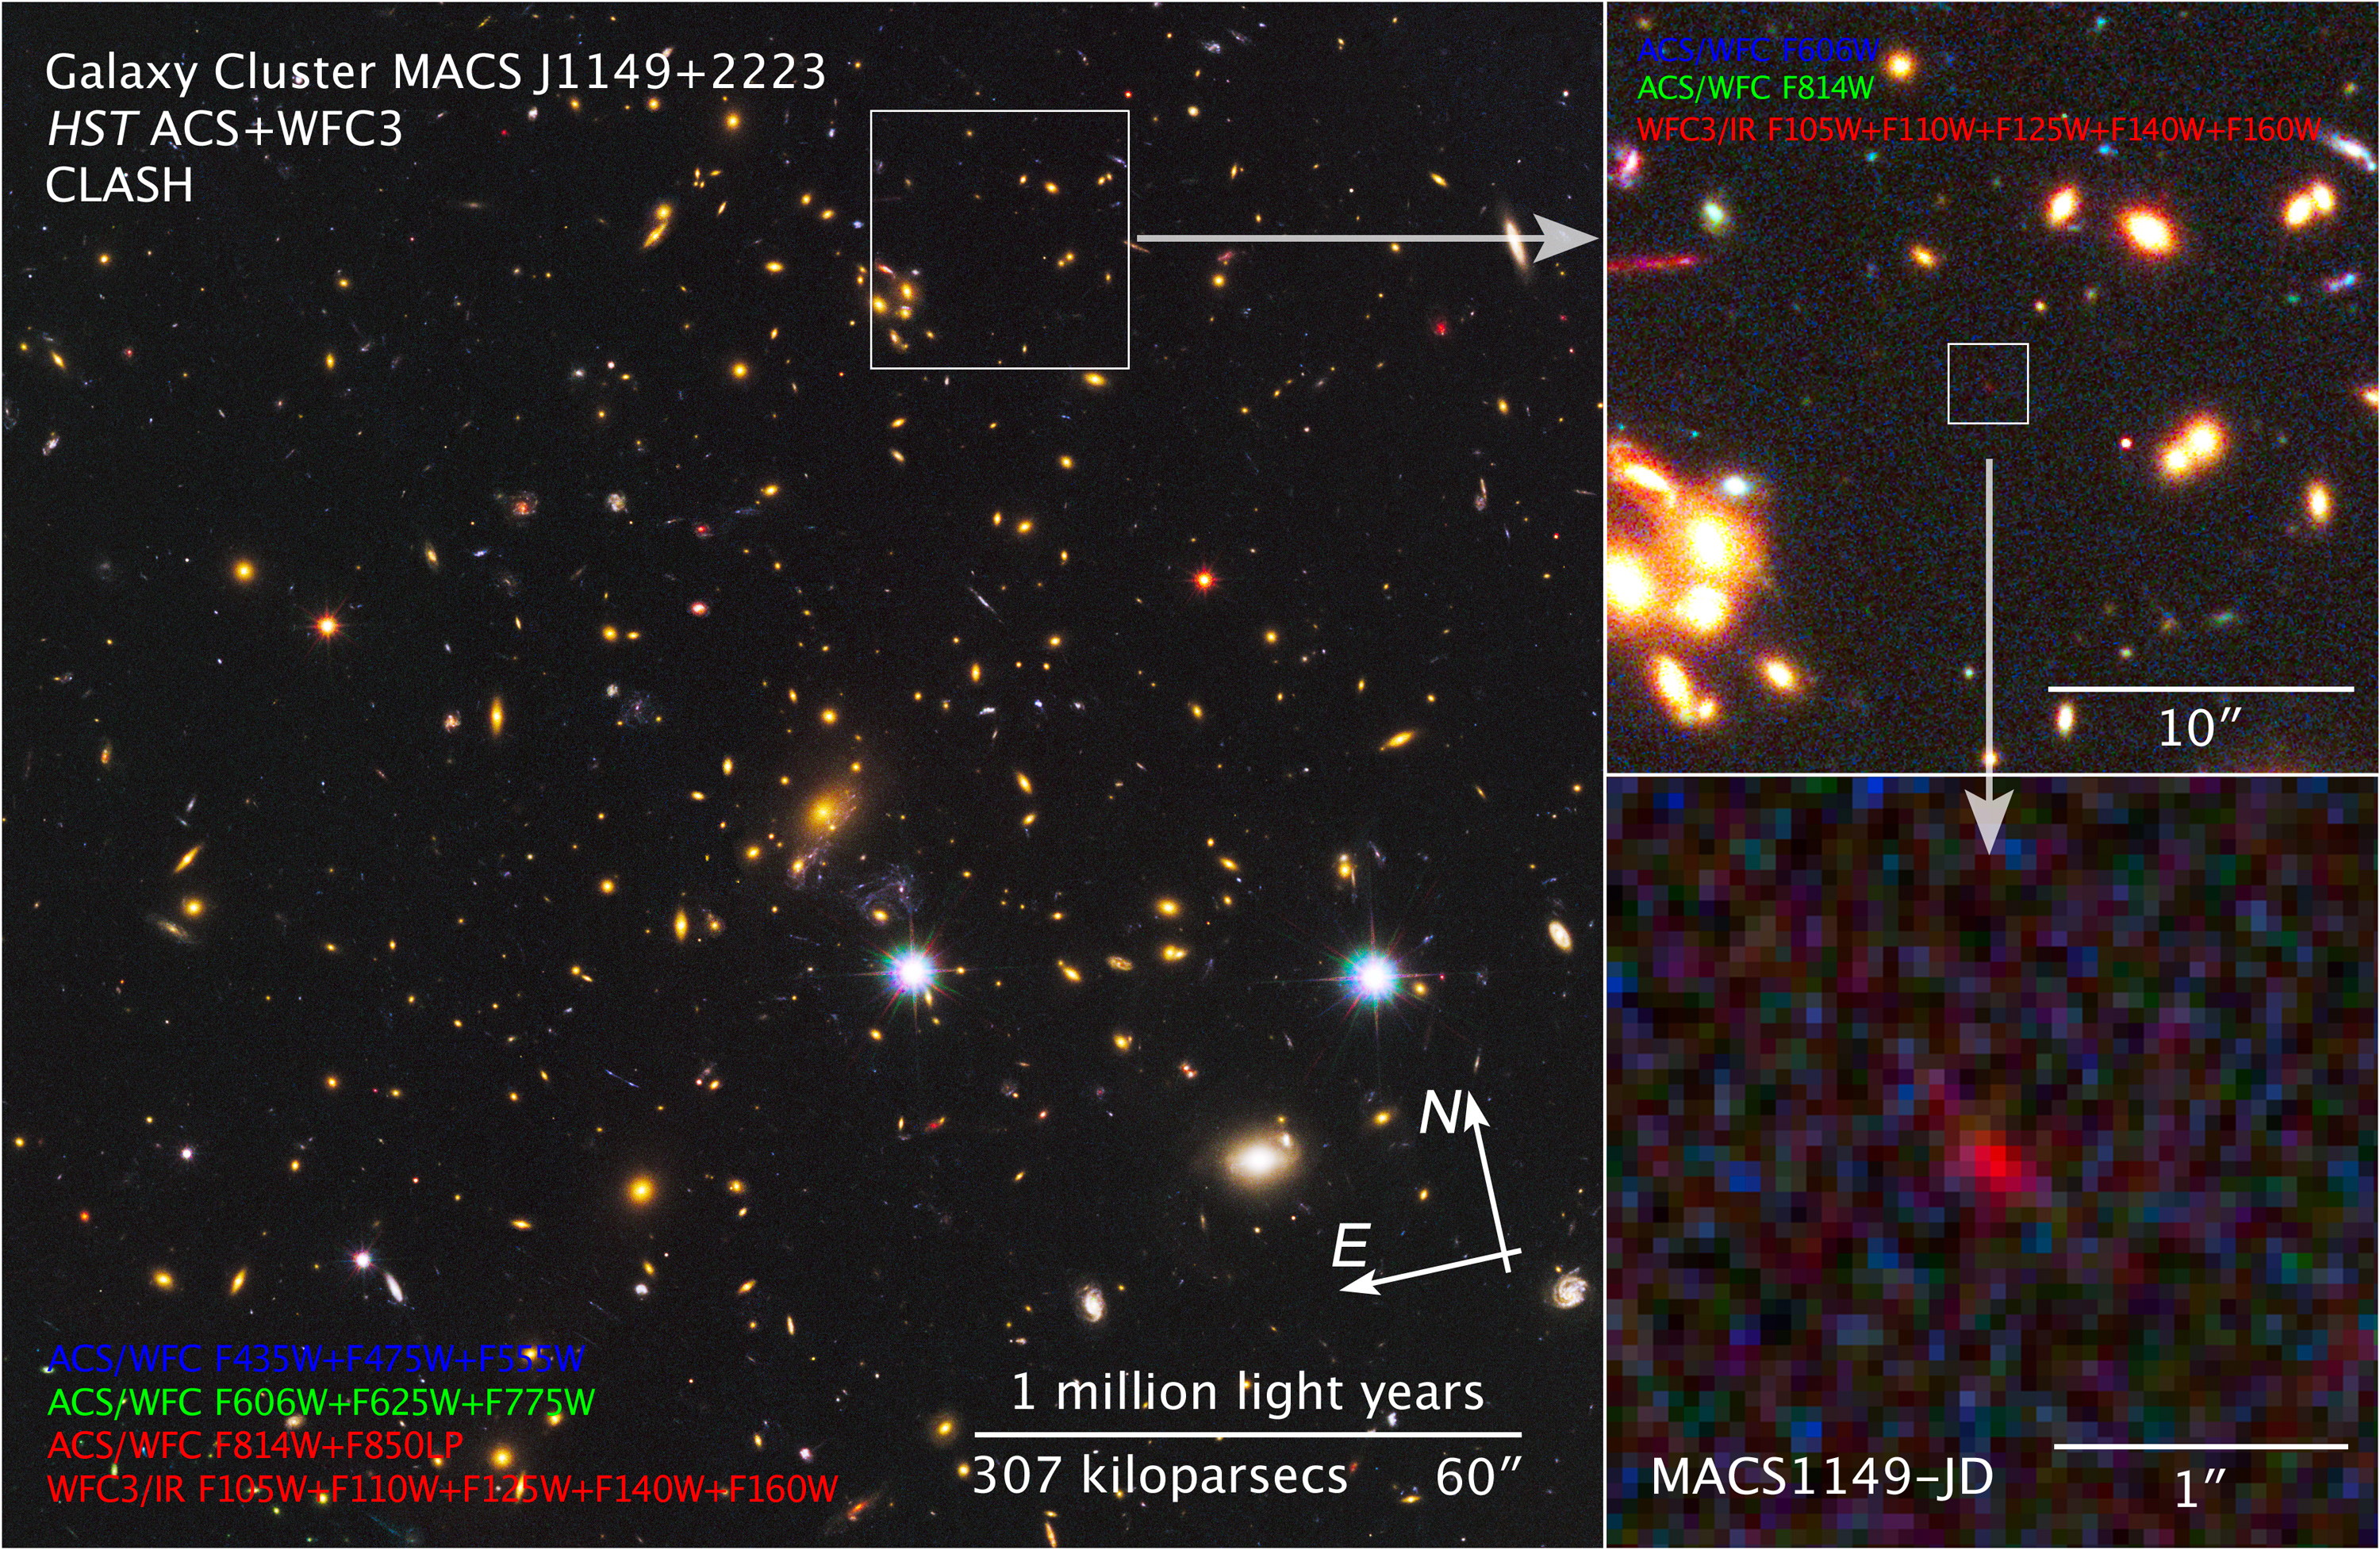

Compass and scale image of MACS J1149+2223

The large image on the left is dominated by the many galaxies of the massive cluster MACS J1149+2223. Gravitational lensing by the giant cluster brightens the light from a newfound galaxy, known as MACS1149-JD, some 15 times. The upper right shows MACS1149-JD in more detail, and a deeper zoom appears to the lower right. This newfound galaxy is thought to be the most distant galaxy ever observed and opens a window onto the deepest, most remote epochs of cosmic history

Credit: NASA, ESA, and Z. Levay (STScI)